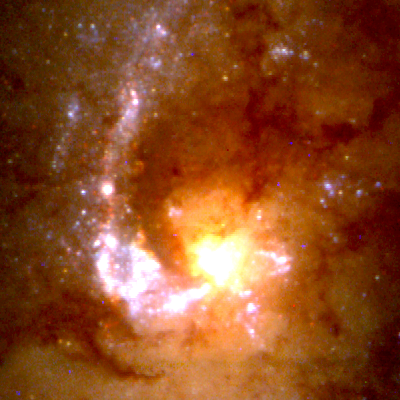

Close-Up of Star Formation in Antennae Galaxy

These close-up views of the cores of each galaxy show entrapped dust and gas funneled into the center. The nucleus of NGC 4038 (lower right) is obscured by dust which dims and reddens starlight by scattering the shorter, bluer wavelengths. This is also the reason the young star clusters in the dusty regions appear red instead of blue.

Credit: Brad Whitmore (STScI), and NASA/ESA